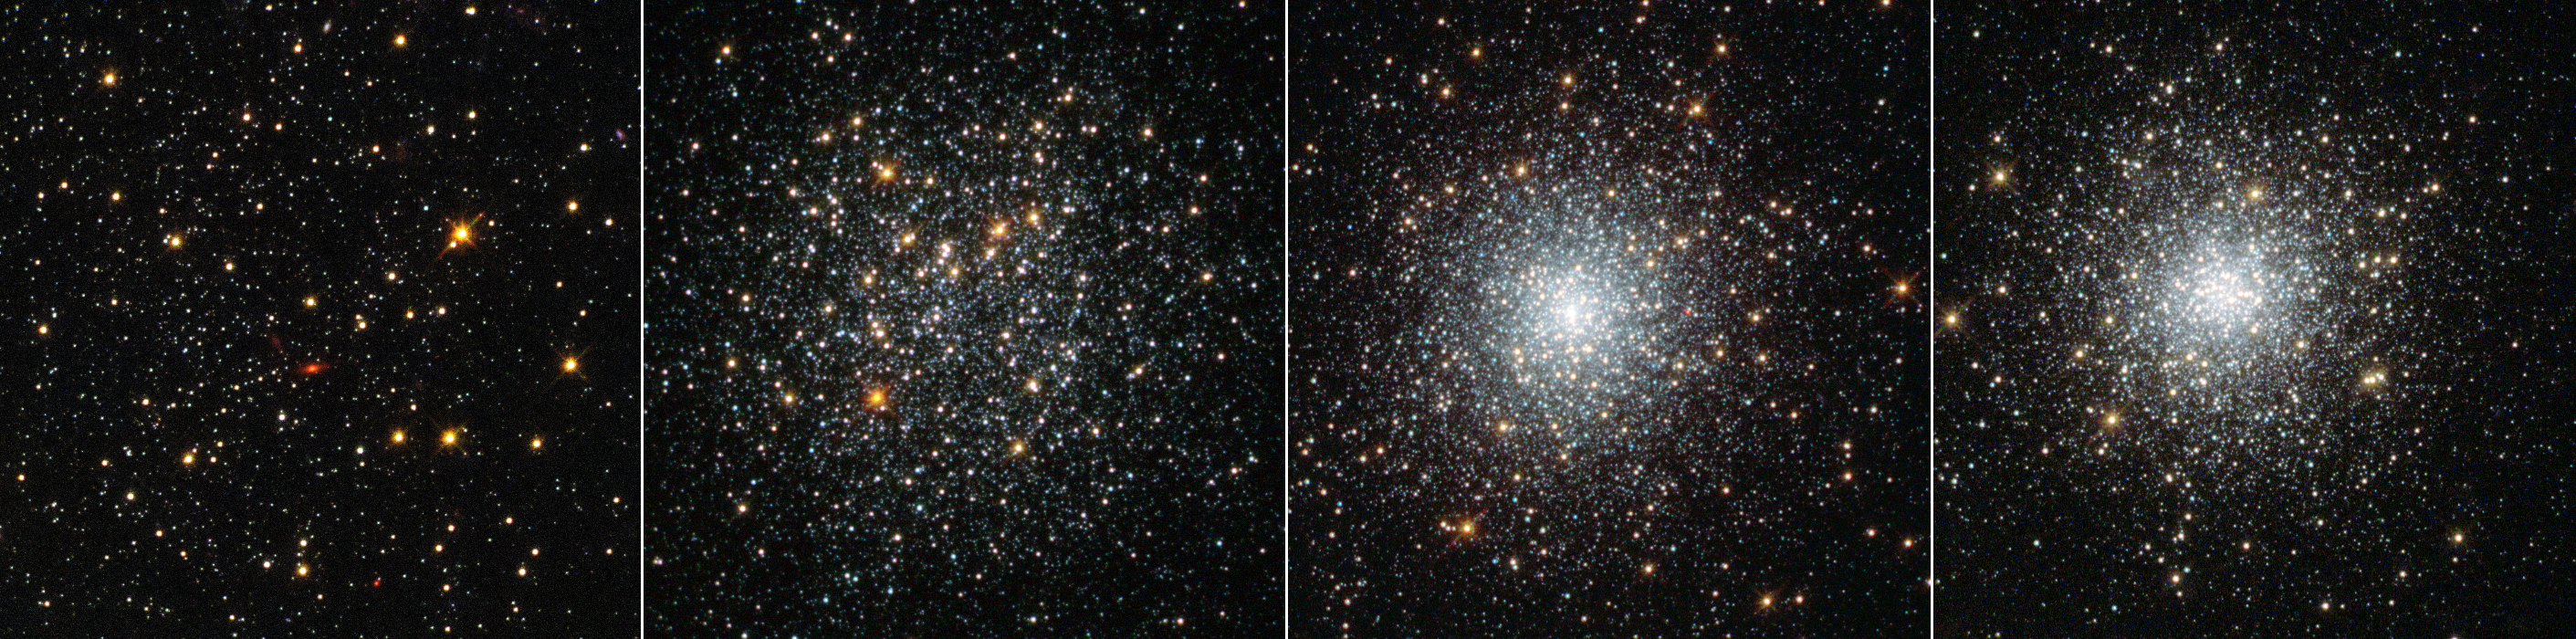

Four globular clusters in Fornax

This NASA/ESA Hubble Space Telescope image shows four globular clusters in the dwarf galaxy Fornax.

New observations of the clusters — large balls of stars that orbit the centres of galaxies — show they are very similar to those found in our galaxy, the Milky Way. The finding is at odds with leading theories on how these clusters form — in these theories, globular clusters should be nestled among large quantities of old stars — and so the mystery of how these objects came to exist deepens.

Left to right: Fornax 1, Fornax 2, Fornax 3 and Fornax 5. Their positions within the galaxy are shown in image G.

Credit: NASA, ESA, S. Larsen (Radboud University, the Netherlands)